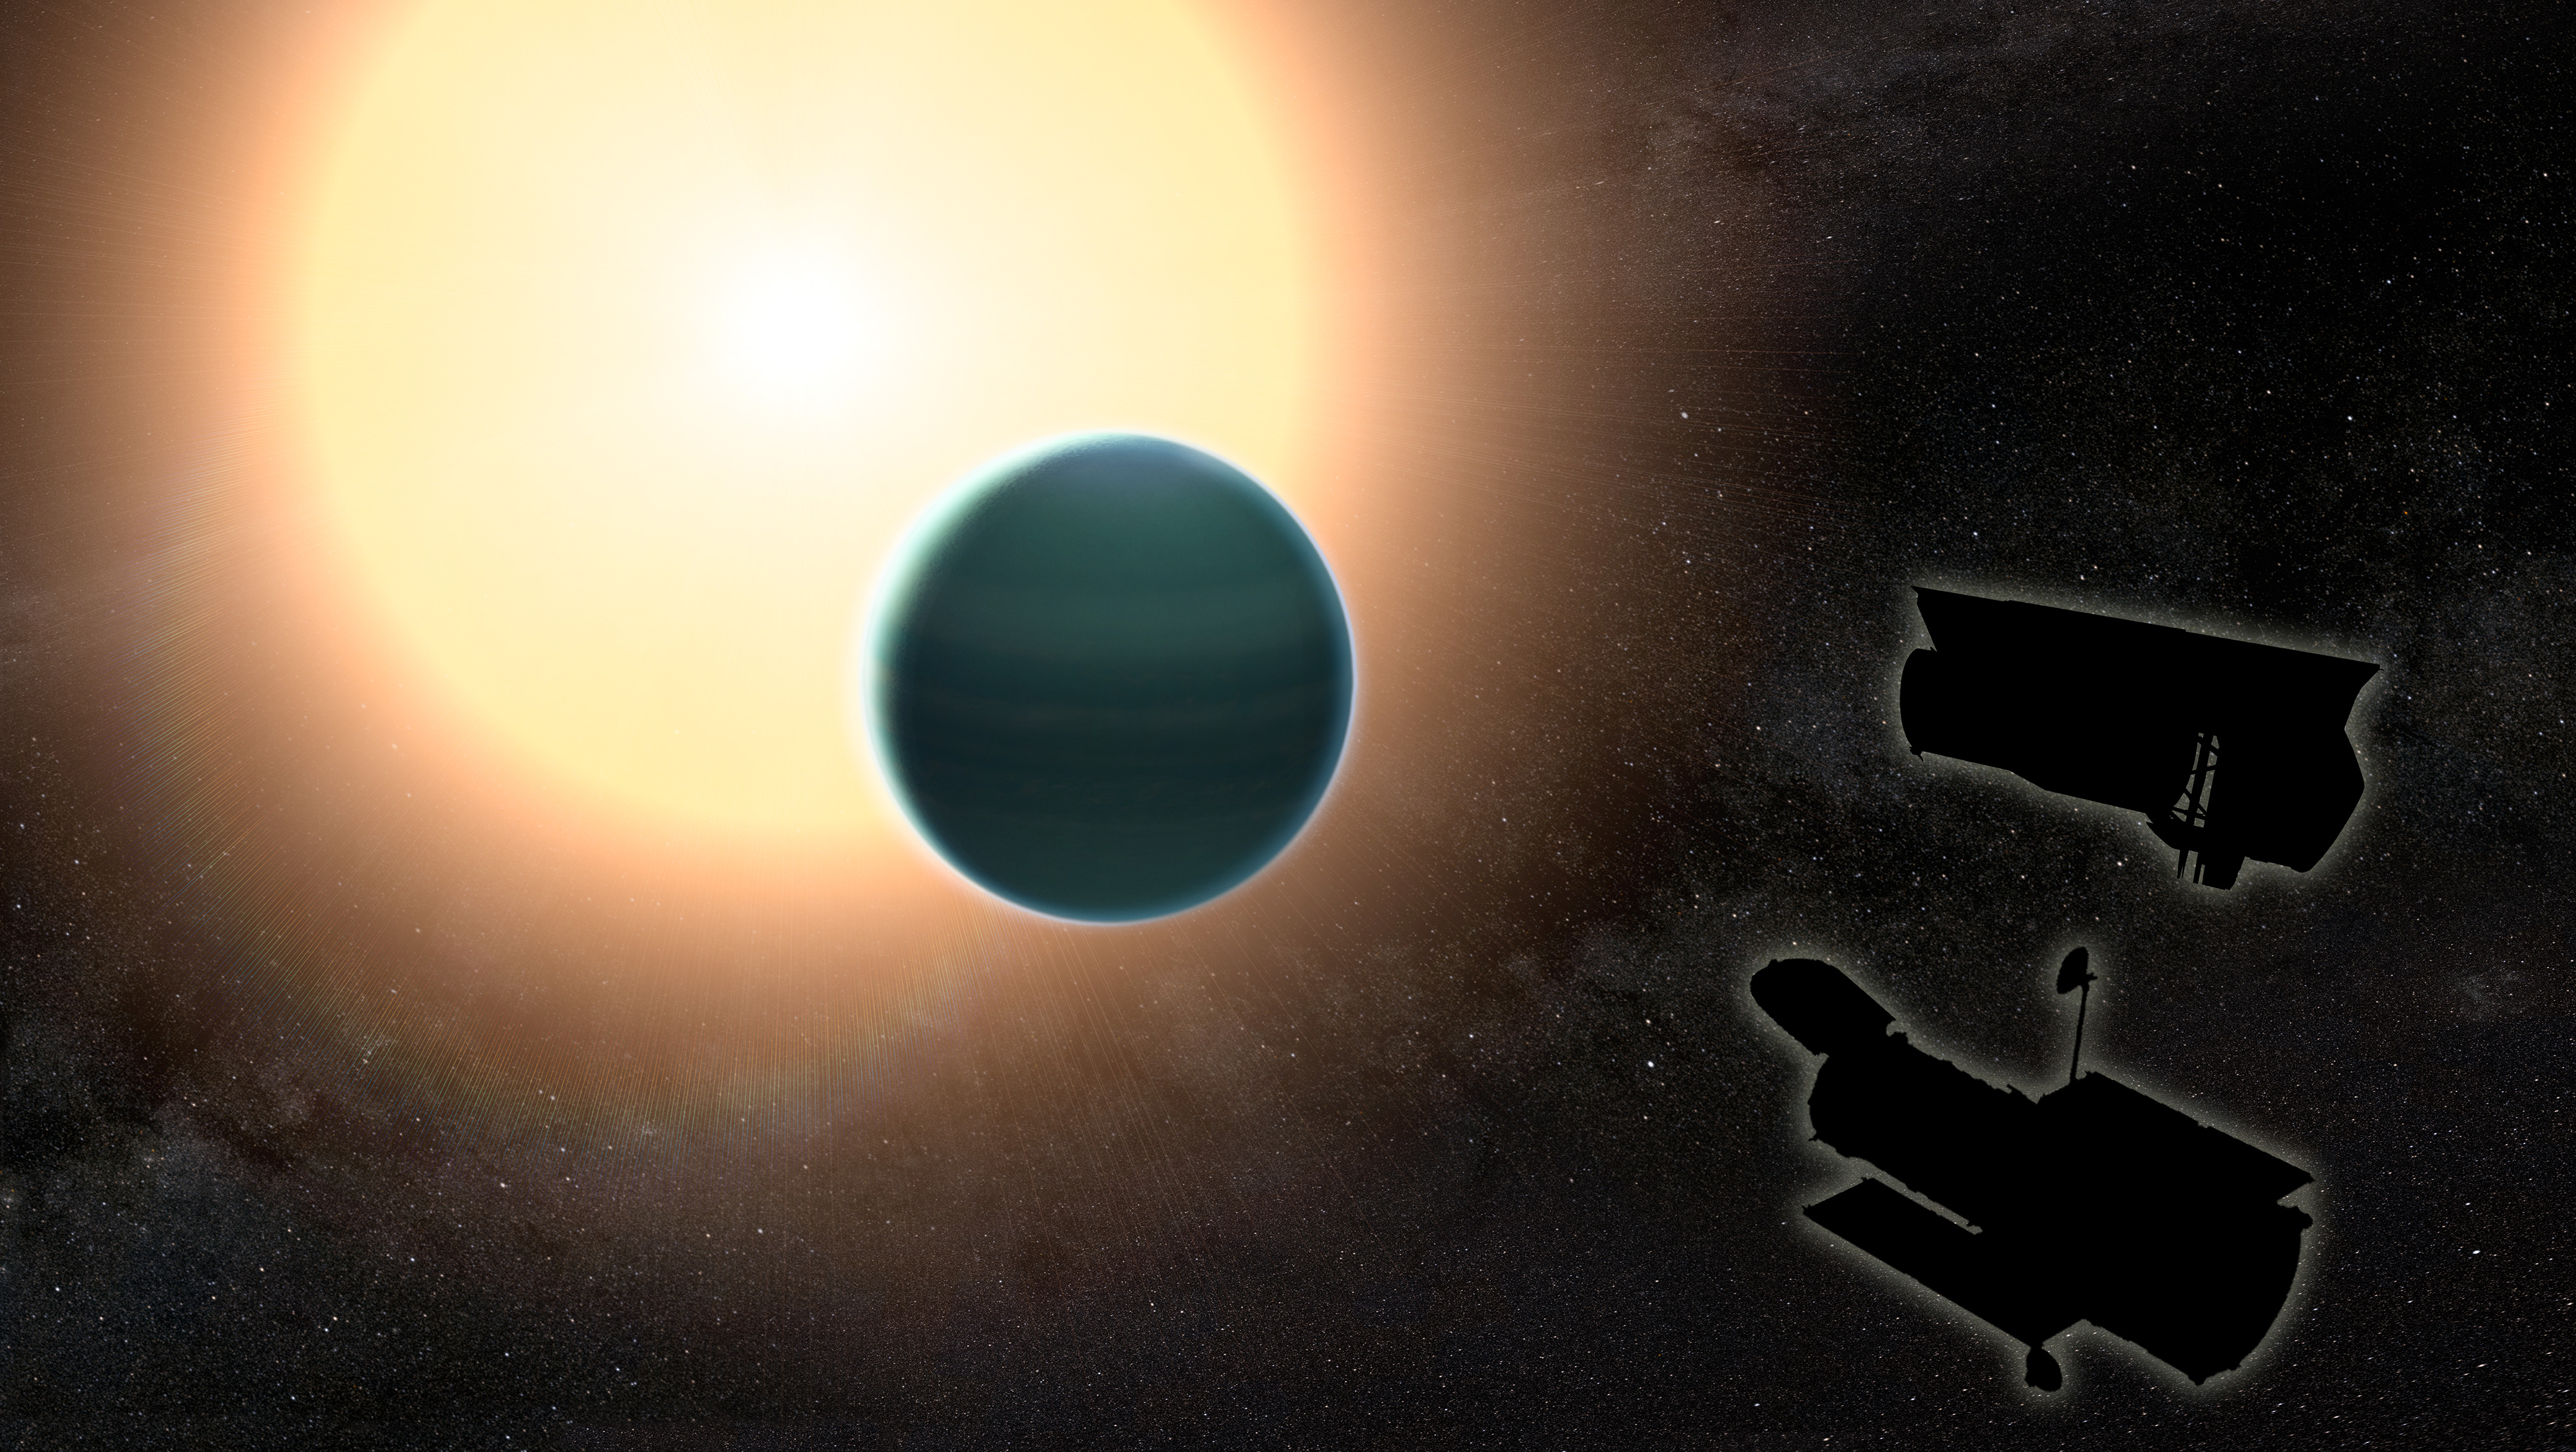

Study finds unexpectedly primitive atmosphere around warm Neptune

The atmosphere of the distant warm Neptune HAT-P-26b, illustrated here in an artist’s impression, is unexpectedly primitive, composed primarily of hydrogen and helium. By combining observations from the NASA/ESA Hubble Space Telescope and and the NASA Spitzer space telescopes, researchers determined that, unlike Neptune and Uranus, the exoplanet has relatively low metallicity, an indication of how rich the planet is in all elements heavier than hydrogen and helium.

Credit: NASA/GSFC